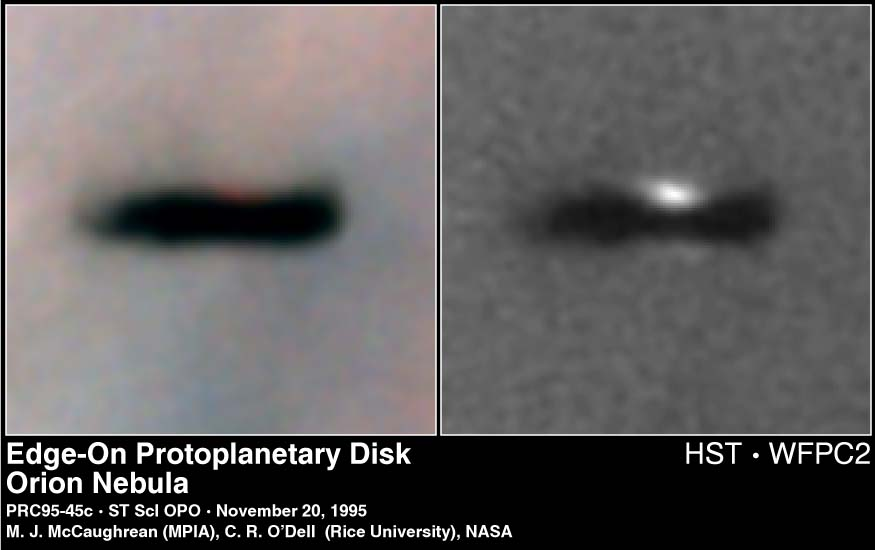

Edge-On Protoplanetary Disc in the Orion Nebula

Resembling an interstellar Frisbee, this is a disk of dust seen edge-on around a newborn star in the Orion nebula, located 1, 500 light-years away. Because the disk is edge-on, the star is largely hidden inside, in this striking Hubble Space Telescope picture.

Credit: Mark McCaughrean (Max-Planck-Institute for Astronomy), C. Robert O'Dell (Rice University), and NASA/ESA